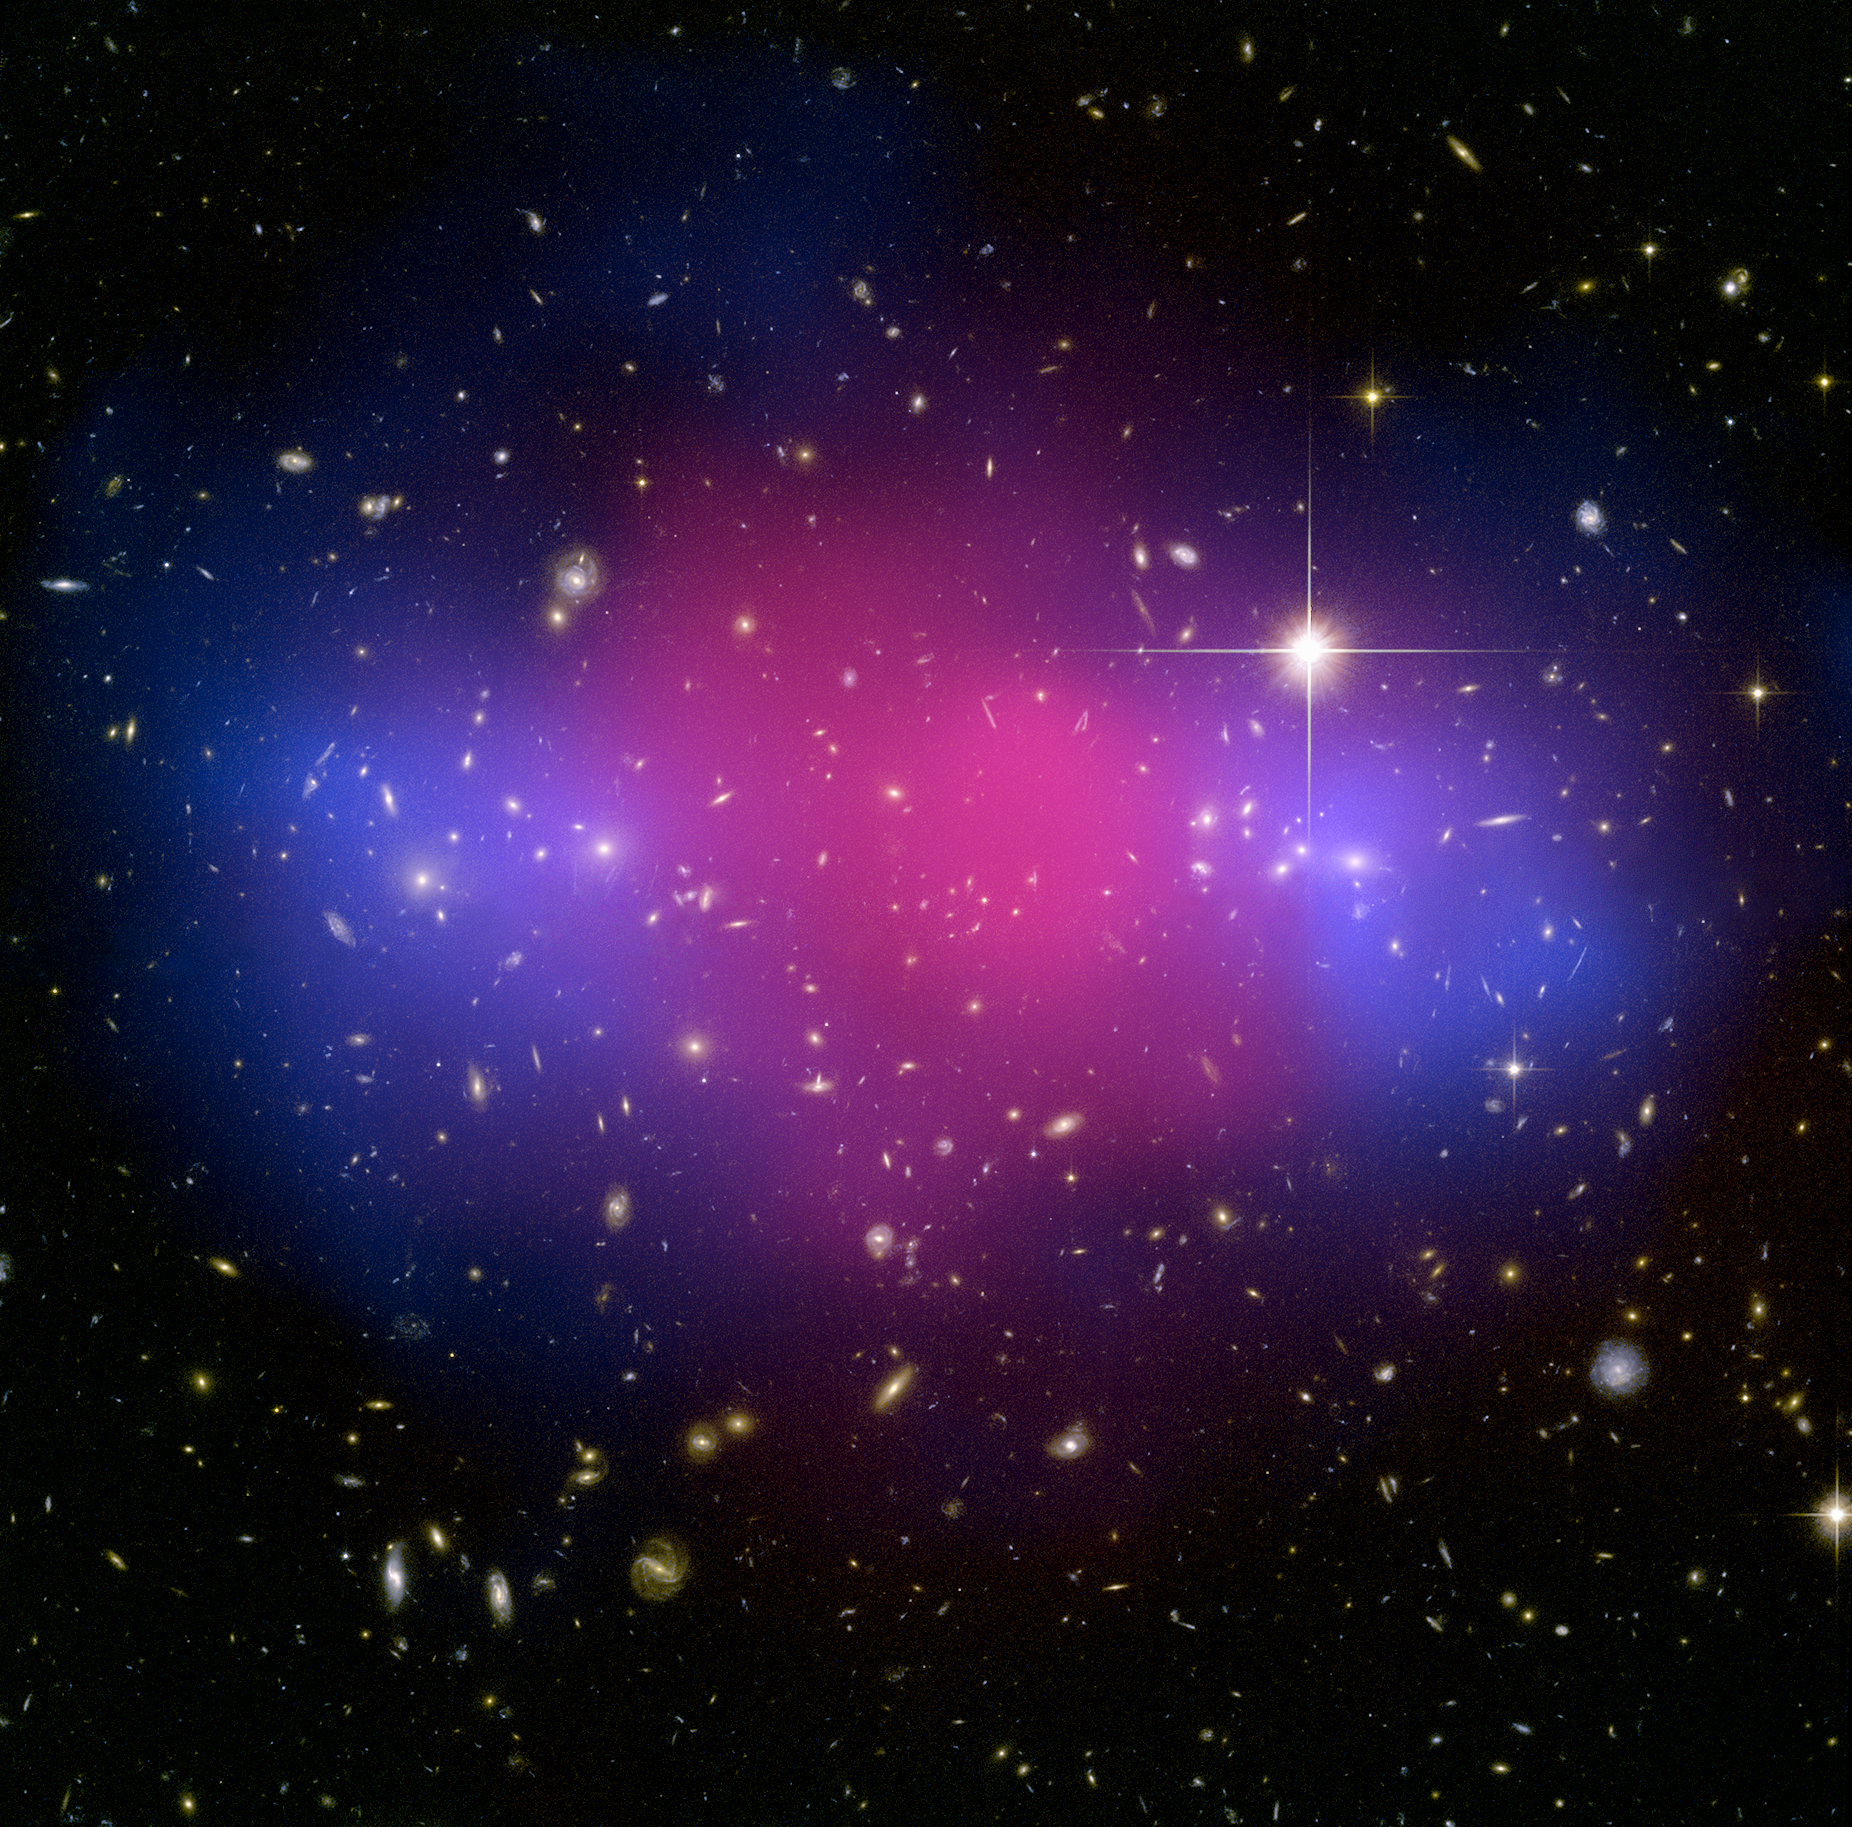

Hubble and Chandra composite of the galaxy cluster MACS J0025.4-1222

This astounding view of galaxy cluster MACSJ0025 demonstrates how ordinary matter and mysterious dark matter interact. The blue cloud-shaped parts flanking the centre show the position of dark matter, mapped by the Advanced Camera for Surveys onboard the NASA/ESA Hubble Space Telescope. The pink middle indicates ordinary matter, charted by NASA's Chandra X-Ray Observatory.

The position of the two matter types shown in the image are explained by MACSJ0025's origin. It was formed when a pair of large galaxy clusters collided. Ordinary matter in the form of hot gas slowed down and pooled at the centre but ghostly dark matter passed straight through.

Hubble used a technique known as gravitational lensing to obtain its data. The light observed was bent by the gravitationally massive galaxy cluster, resulting in an incredibly detailed image. This technique was originally predicted by Einstein.

MACSJ0025 is located in the constellation Cetus, the Whale.

Credit: NASA, ESA, CXC, M. Bradac (University of California, Santa Barbara, USA), and S. Allen (Stanford University, USA).